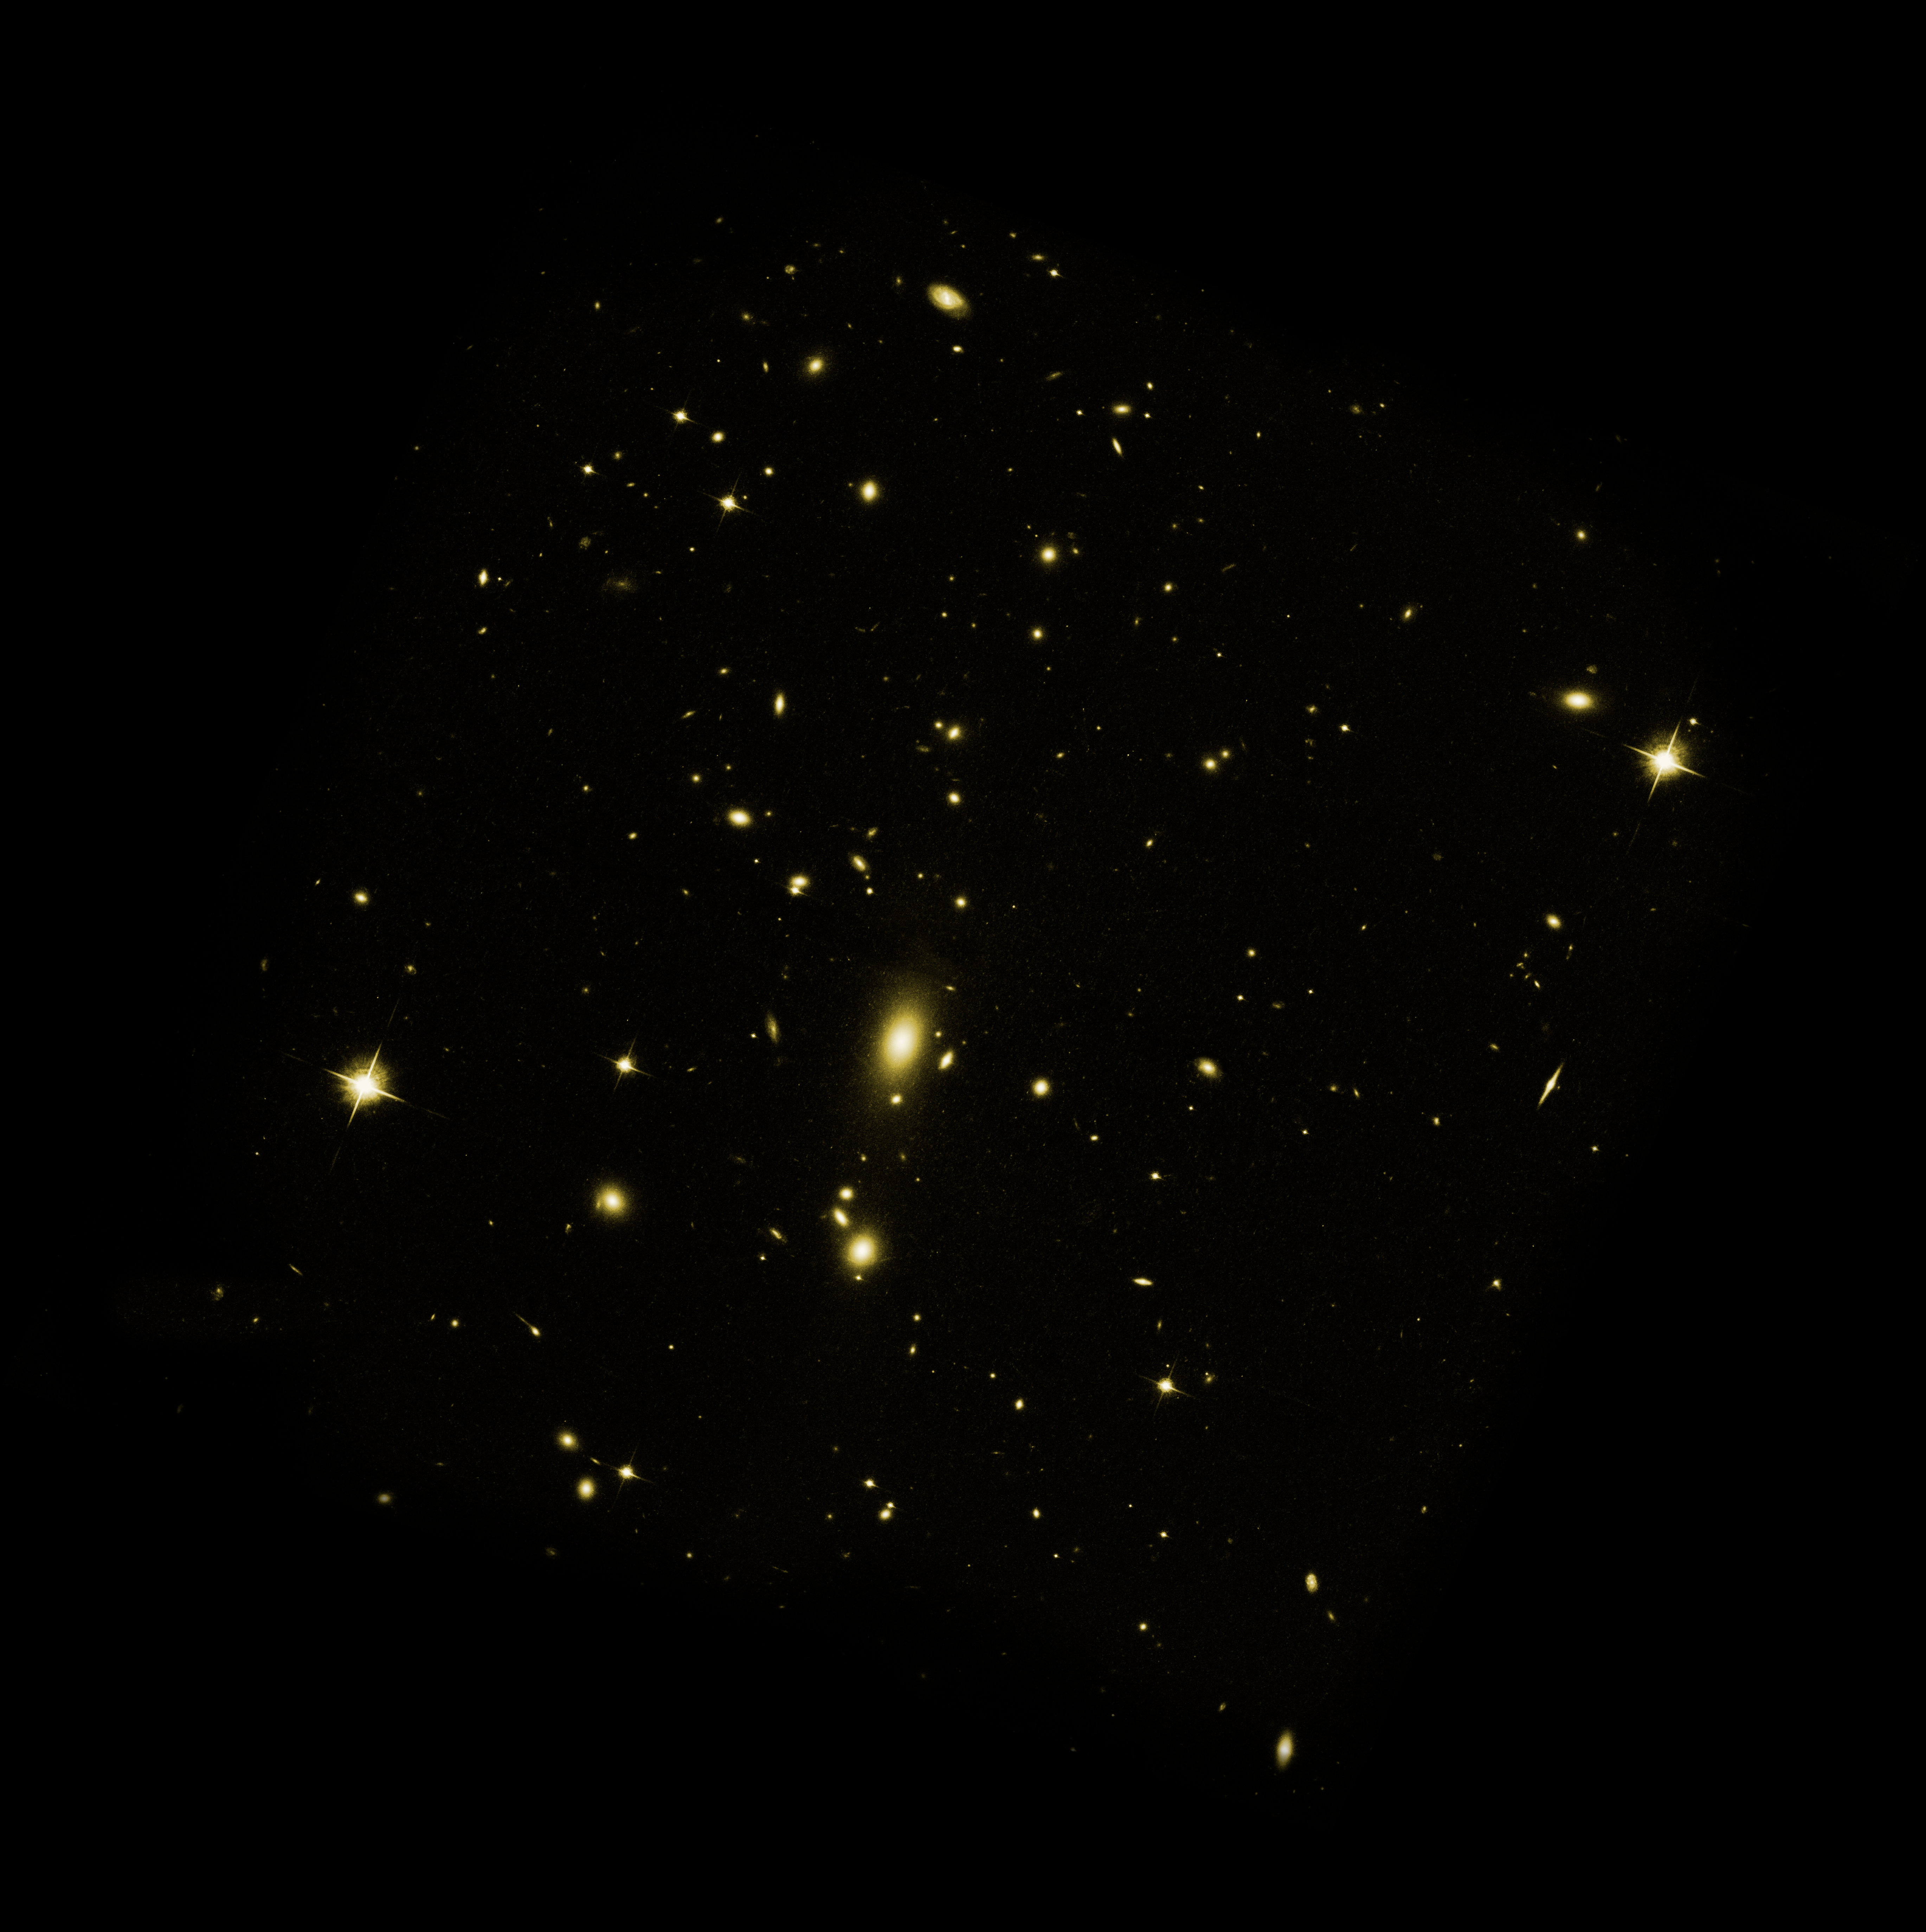

Visible-Light Image of Galaxy Cluster MS 0735

This image of galaxy cluster MS 0735.6+7421 was taken with NASA/ESA Hubble Space Telescope in February 2006. The Advanced Camera for Surveys image shows dozens of galaxies bound together by gravity. Diffuse, hot gas with a temperature of nearly 50 million degrees permeates the space between the galaxies. A supermassive black hole weighing nearly a billion times the mass of our Sun lurks in the nucleus of the bright central galaxy.

Credit: NASA, ESA, and B. McNamara (University of Waterloo and Ohio University)